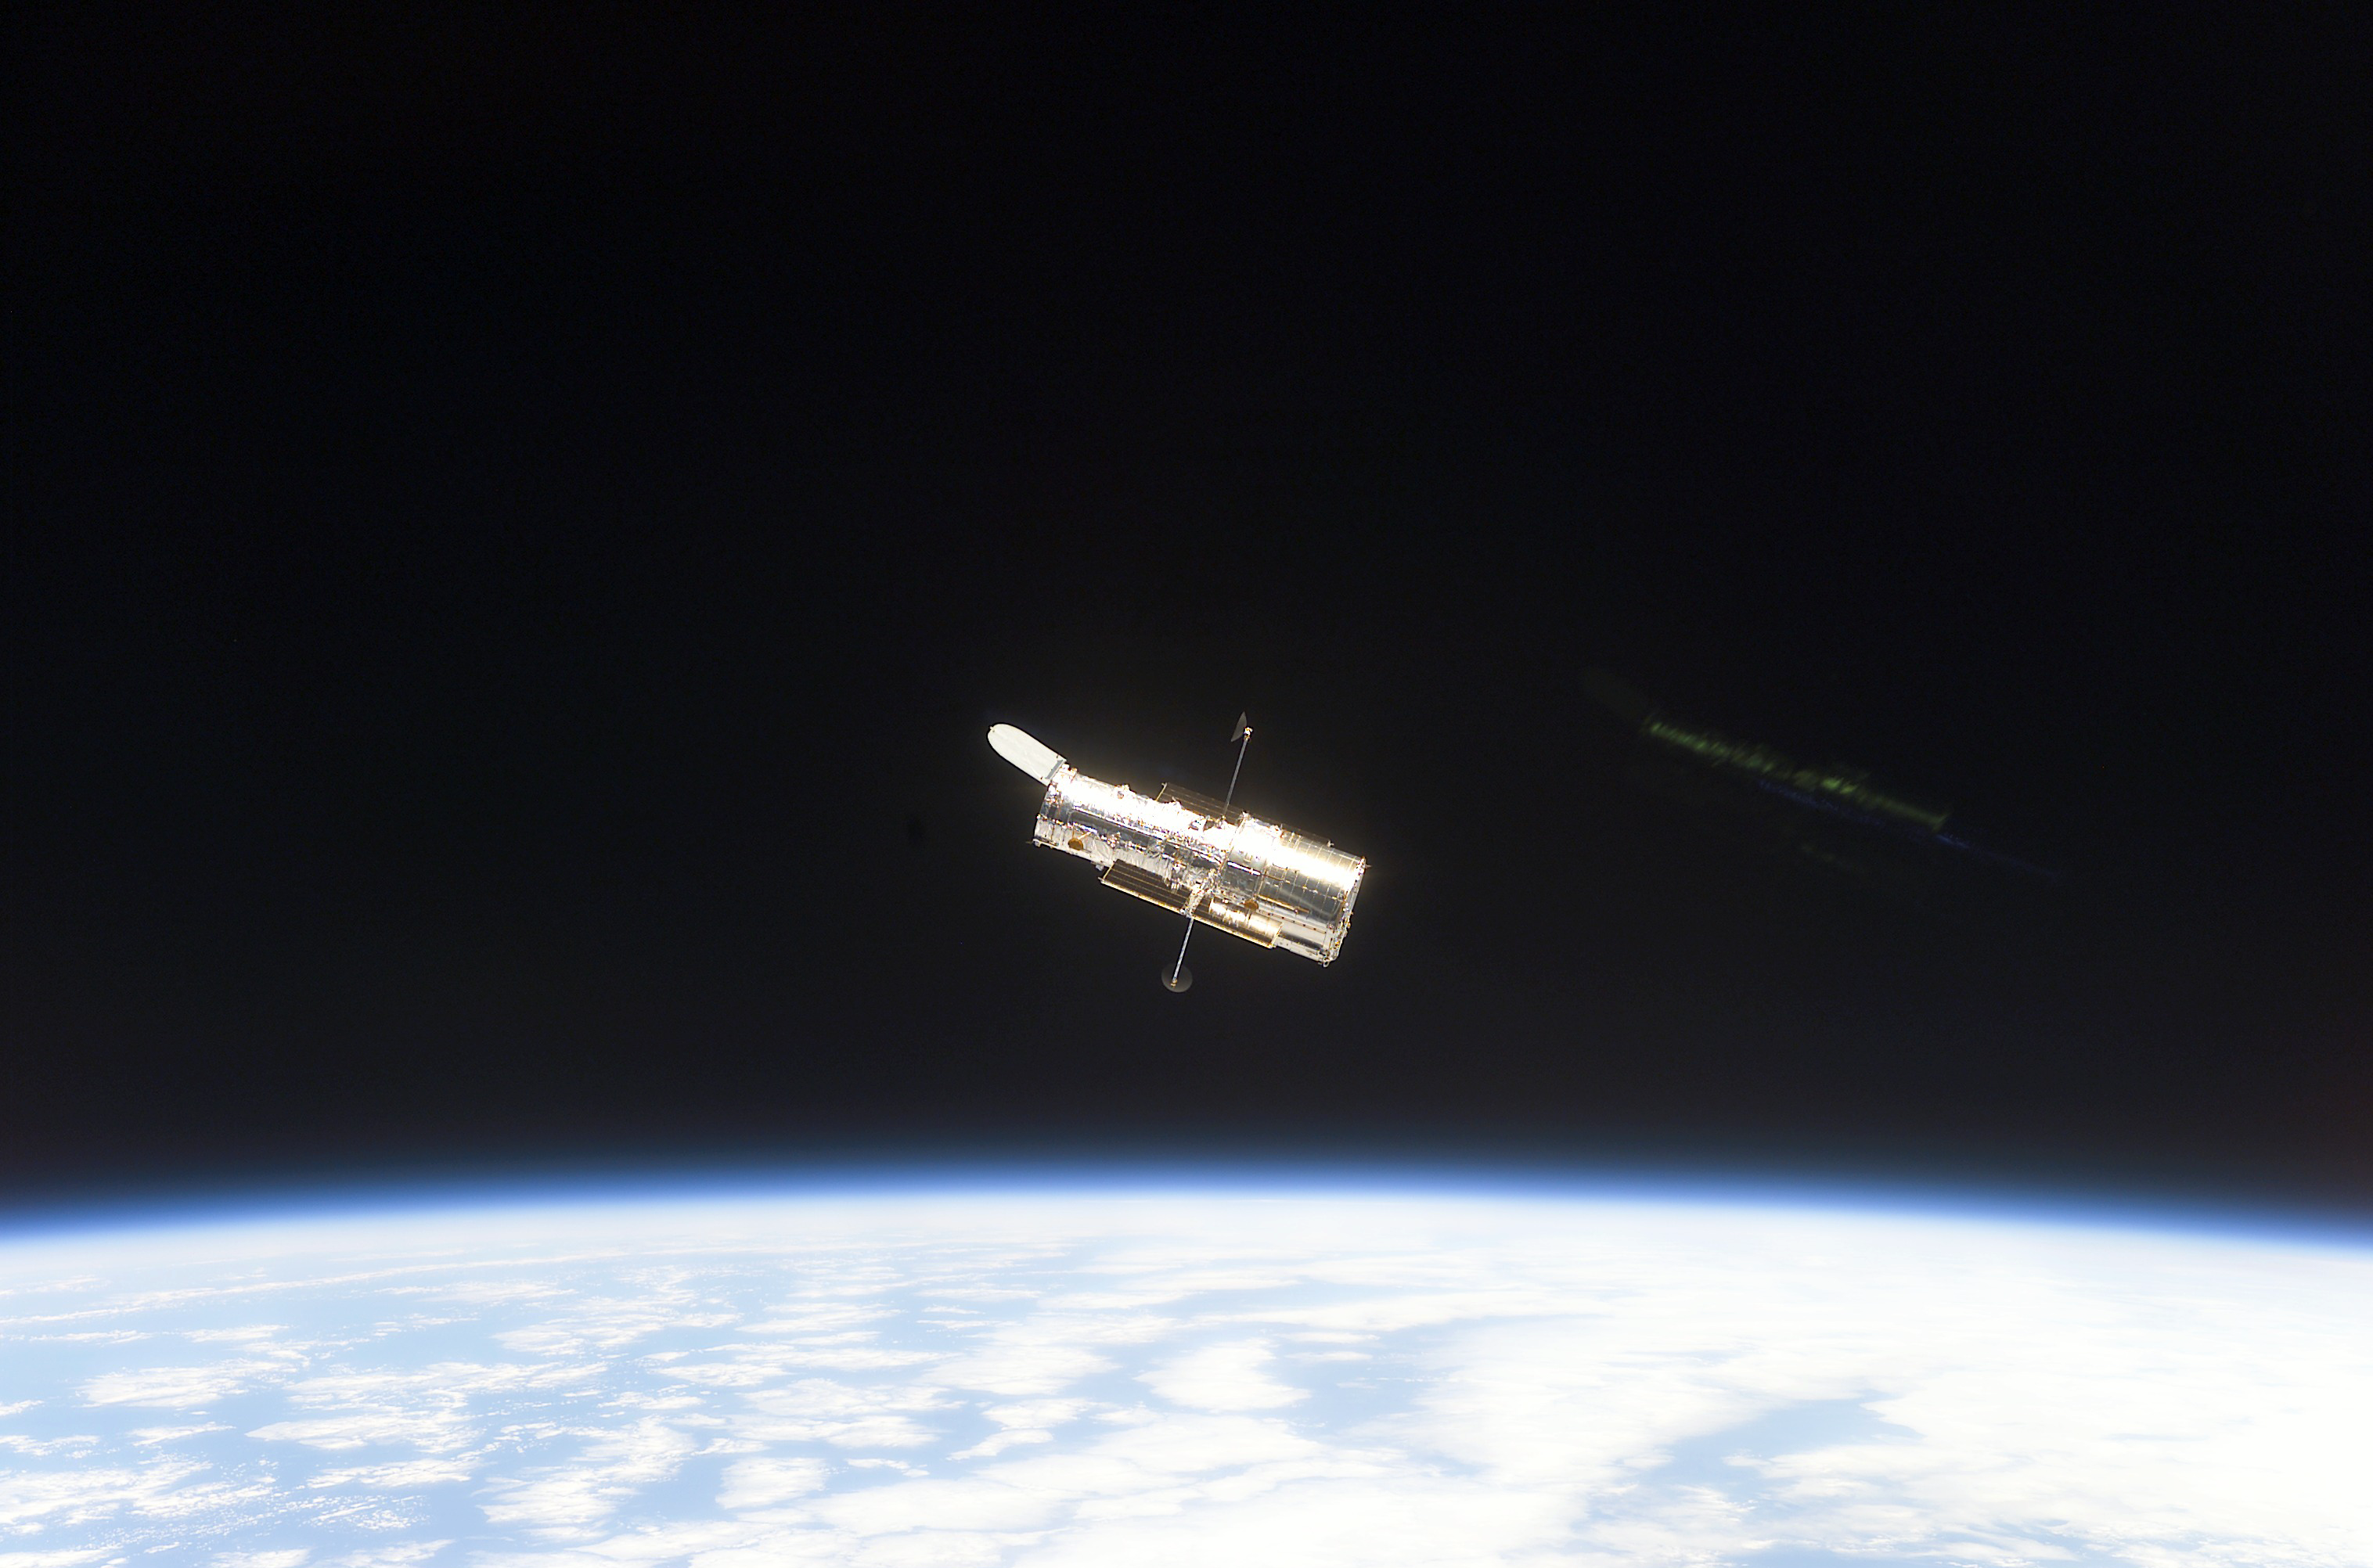

Hubble Space Telescope sporting new solar arrays during SM3B

STS109-E-5700 (9 March 2002) - The Hubble Space Telescope, sporting new solar arrays and other important but less visible new hardware, begins its separation from the Space Shuttle Columbia. The STS-109 crew deployed the giant telescope at 4:04 a.m. CST (1004 GMT), March 9, 2002. Afterward, the seven crew members began to focus their attention to the trip home, scheduled for March 12. The STS-109 astronauts conducted five space walks to service and upgrade Hubble. This image was recorded with a digital still camera.

Credit: NASA/ESA